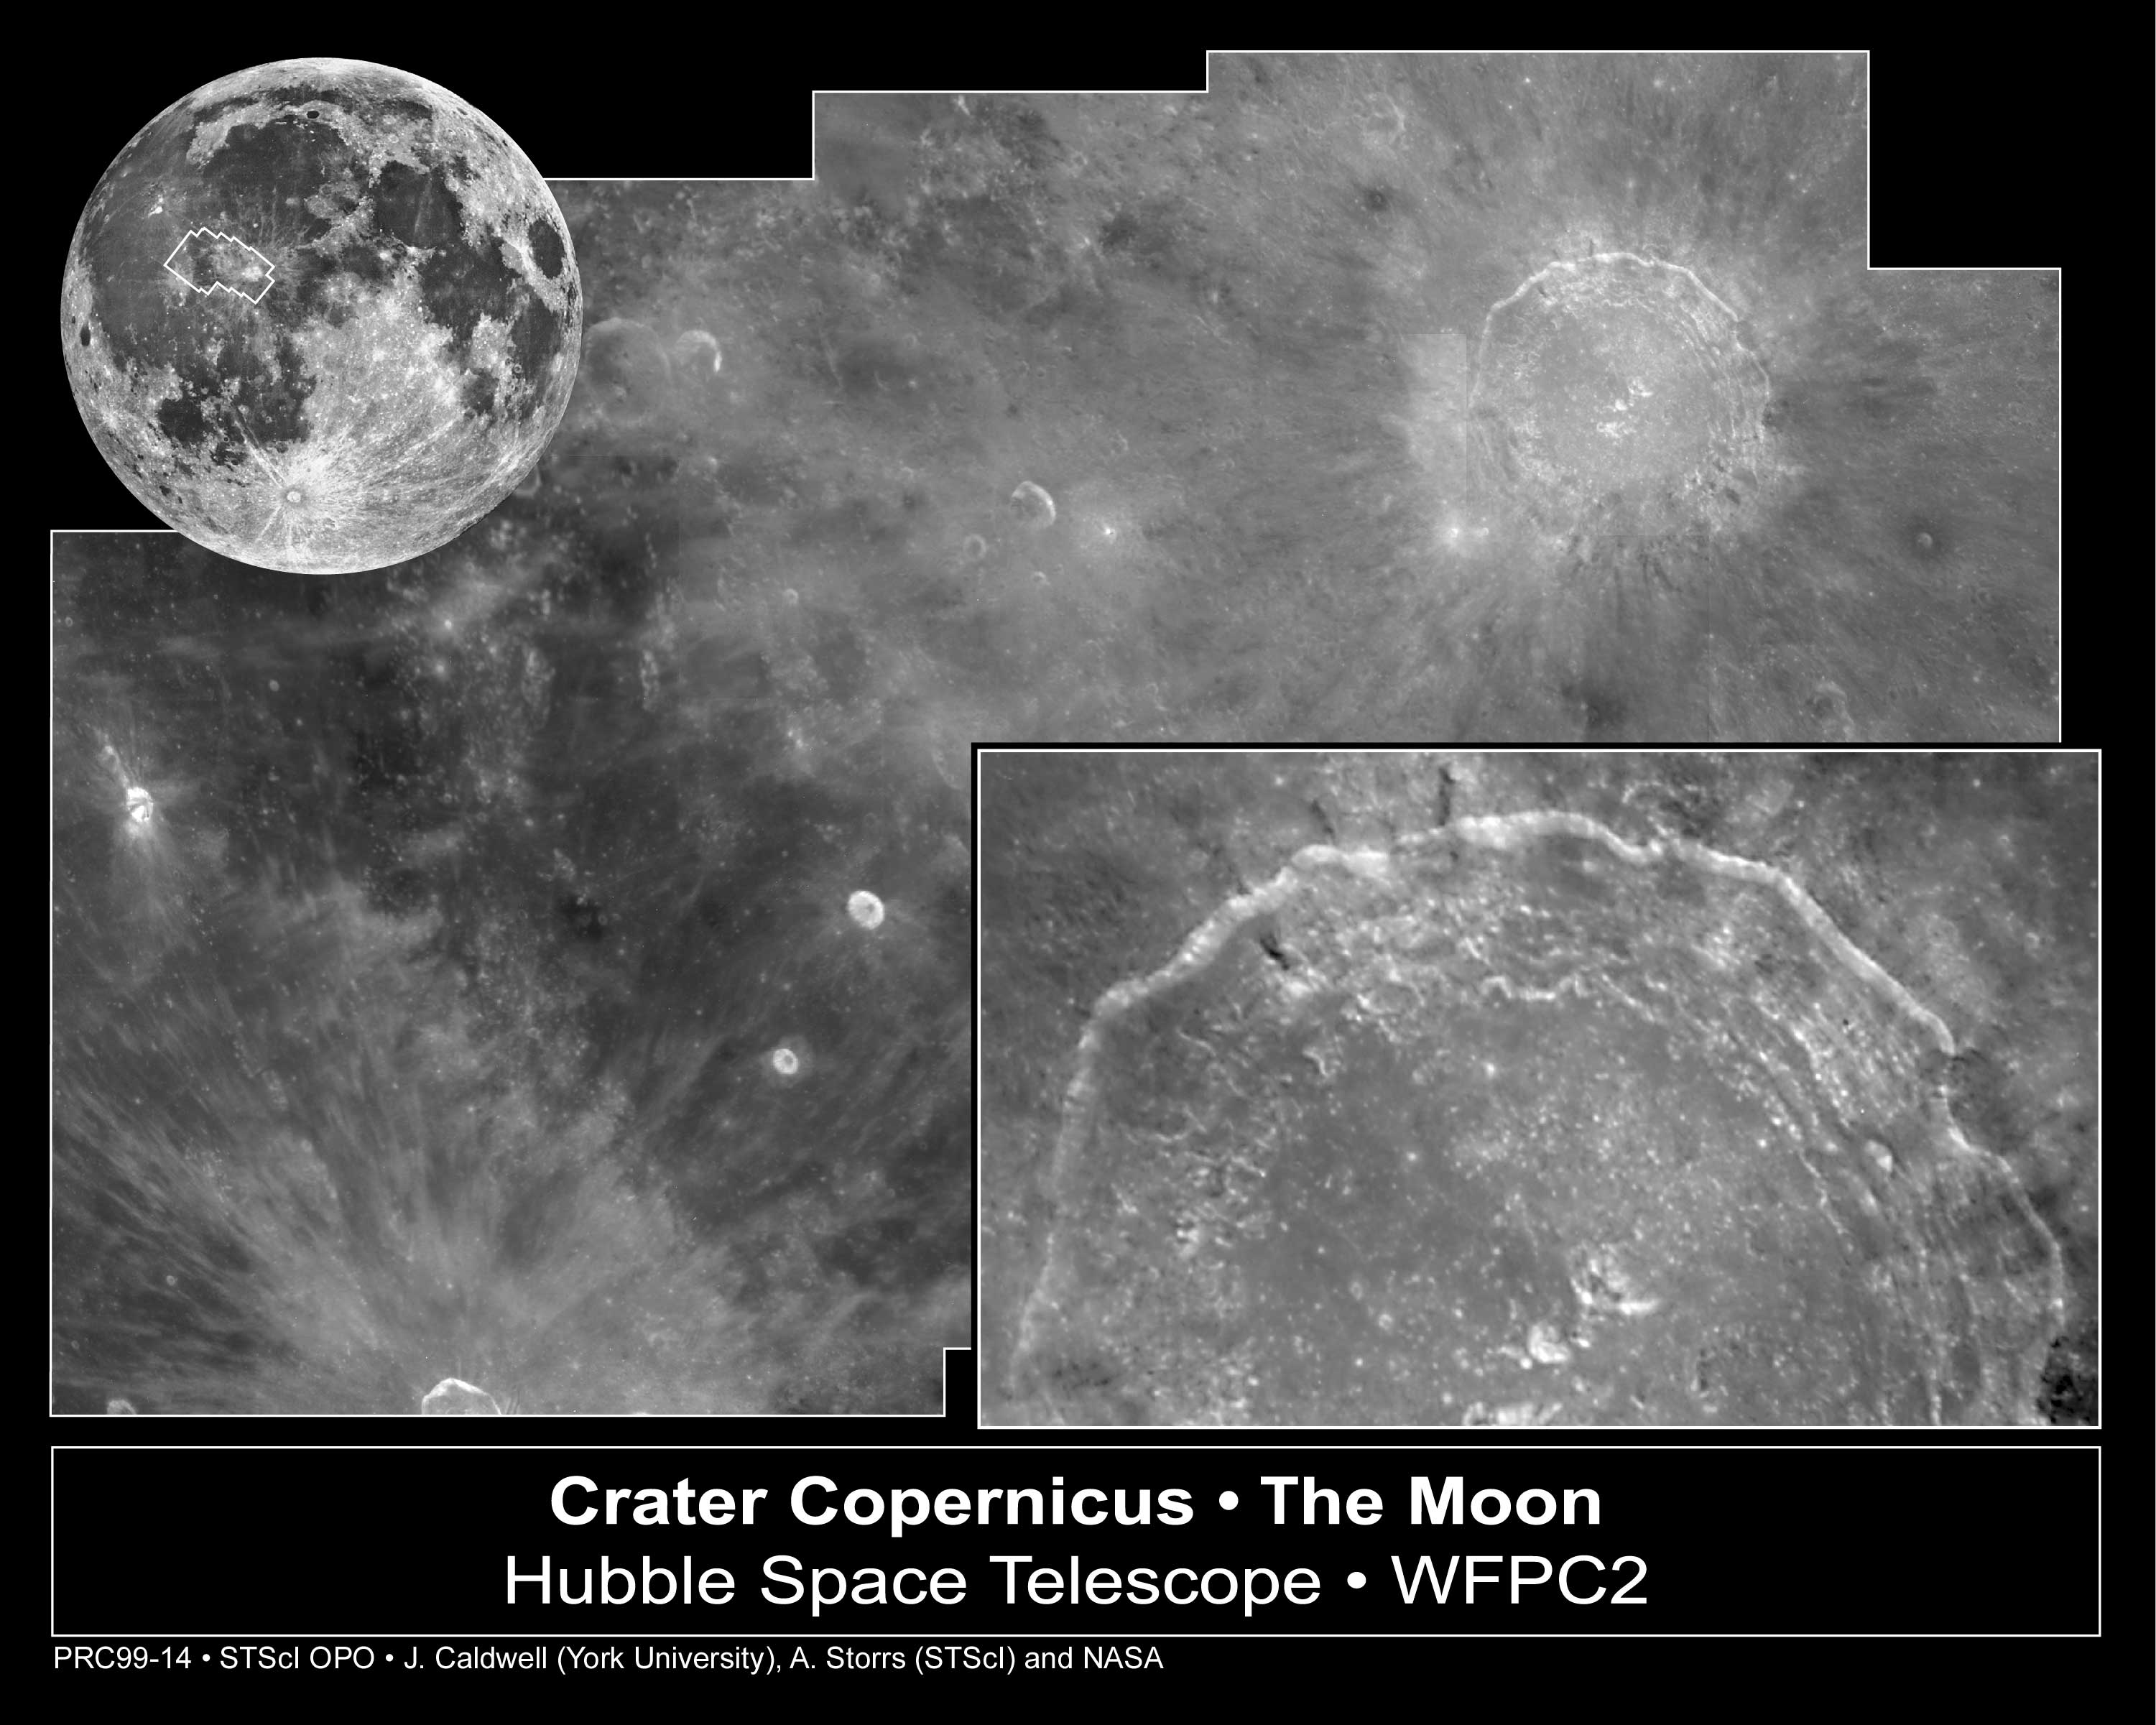

Crater Copernicus on the Moon

In a change of venue from peering at the distant universe, the NASA/ESA Hubble Space Telescope has taken a look at Earth's closest neighbor in space, the Moon. Hubble was aimed at one of the Moon's most dramatic and photogenic targets, the 58 mile-wide (93 km) impact crater Copernicus.

Credit: John Caldwell (York University, Ontario), Alex Storrs (STScI), and NASA/ESA